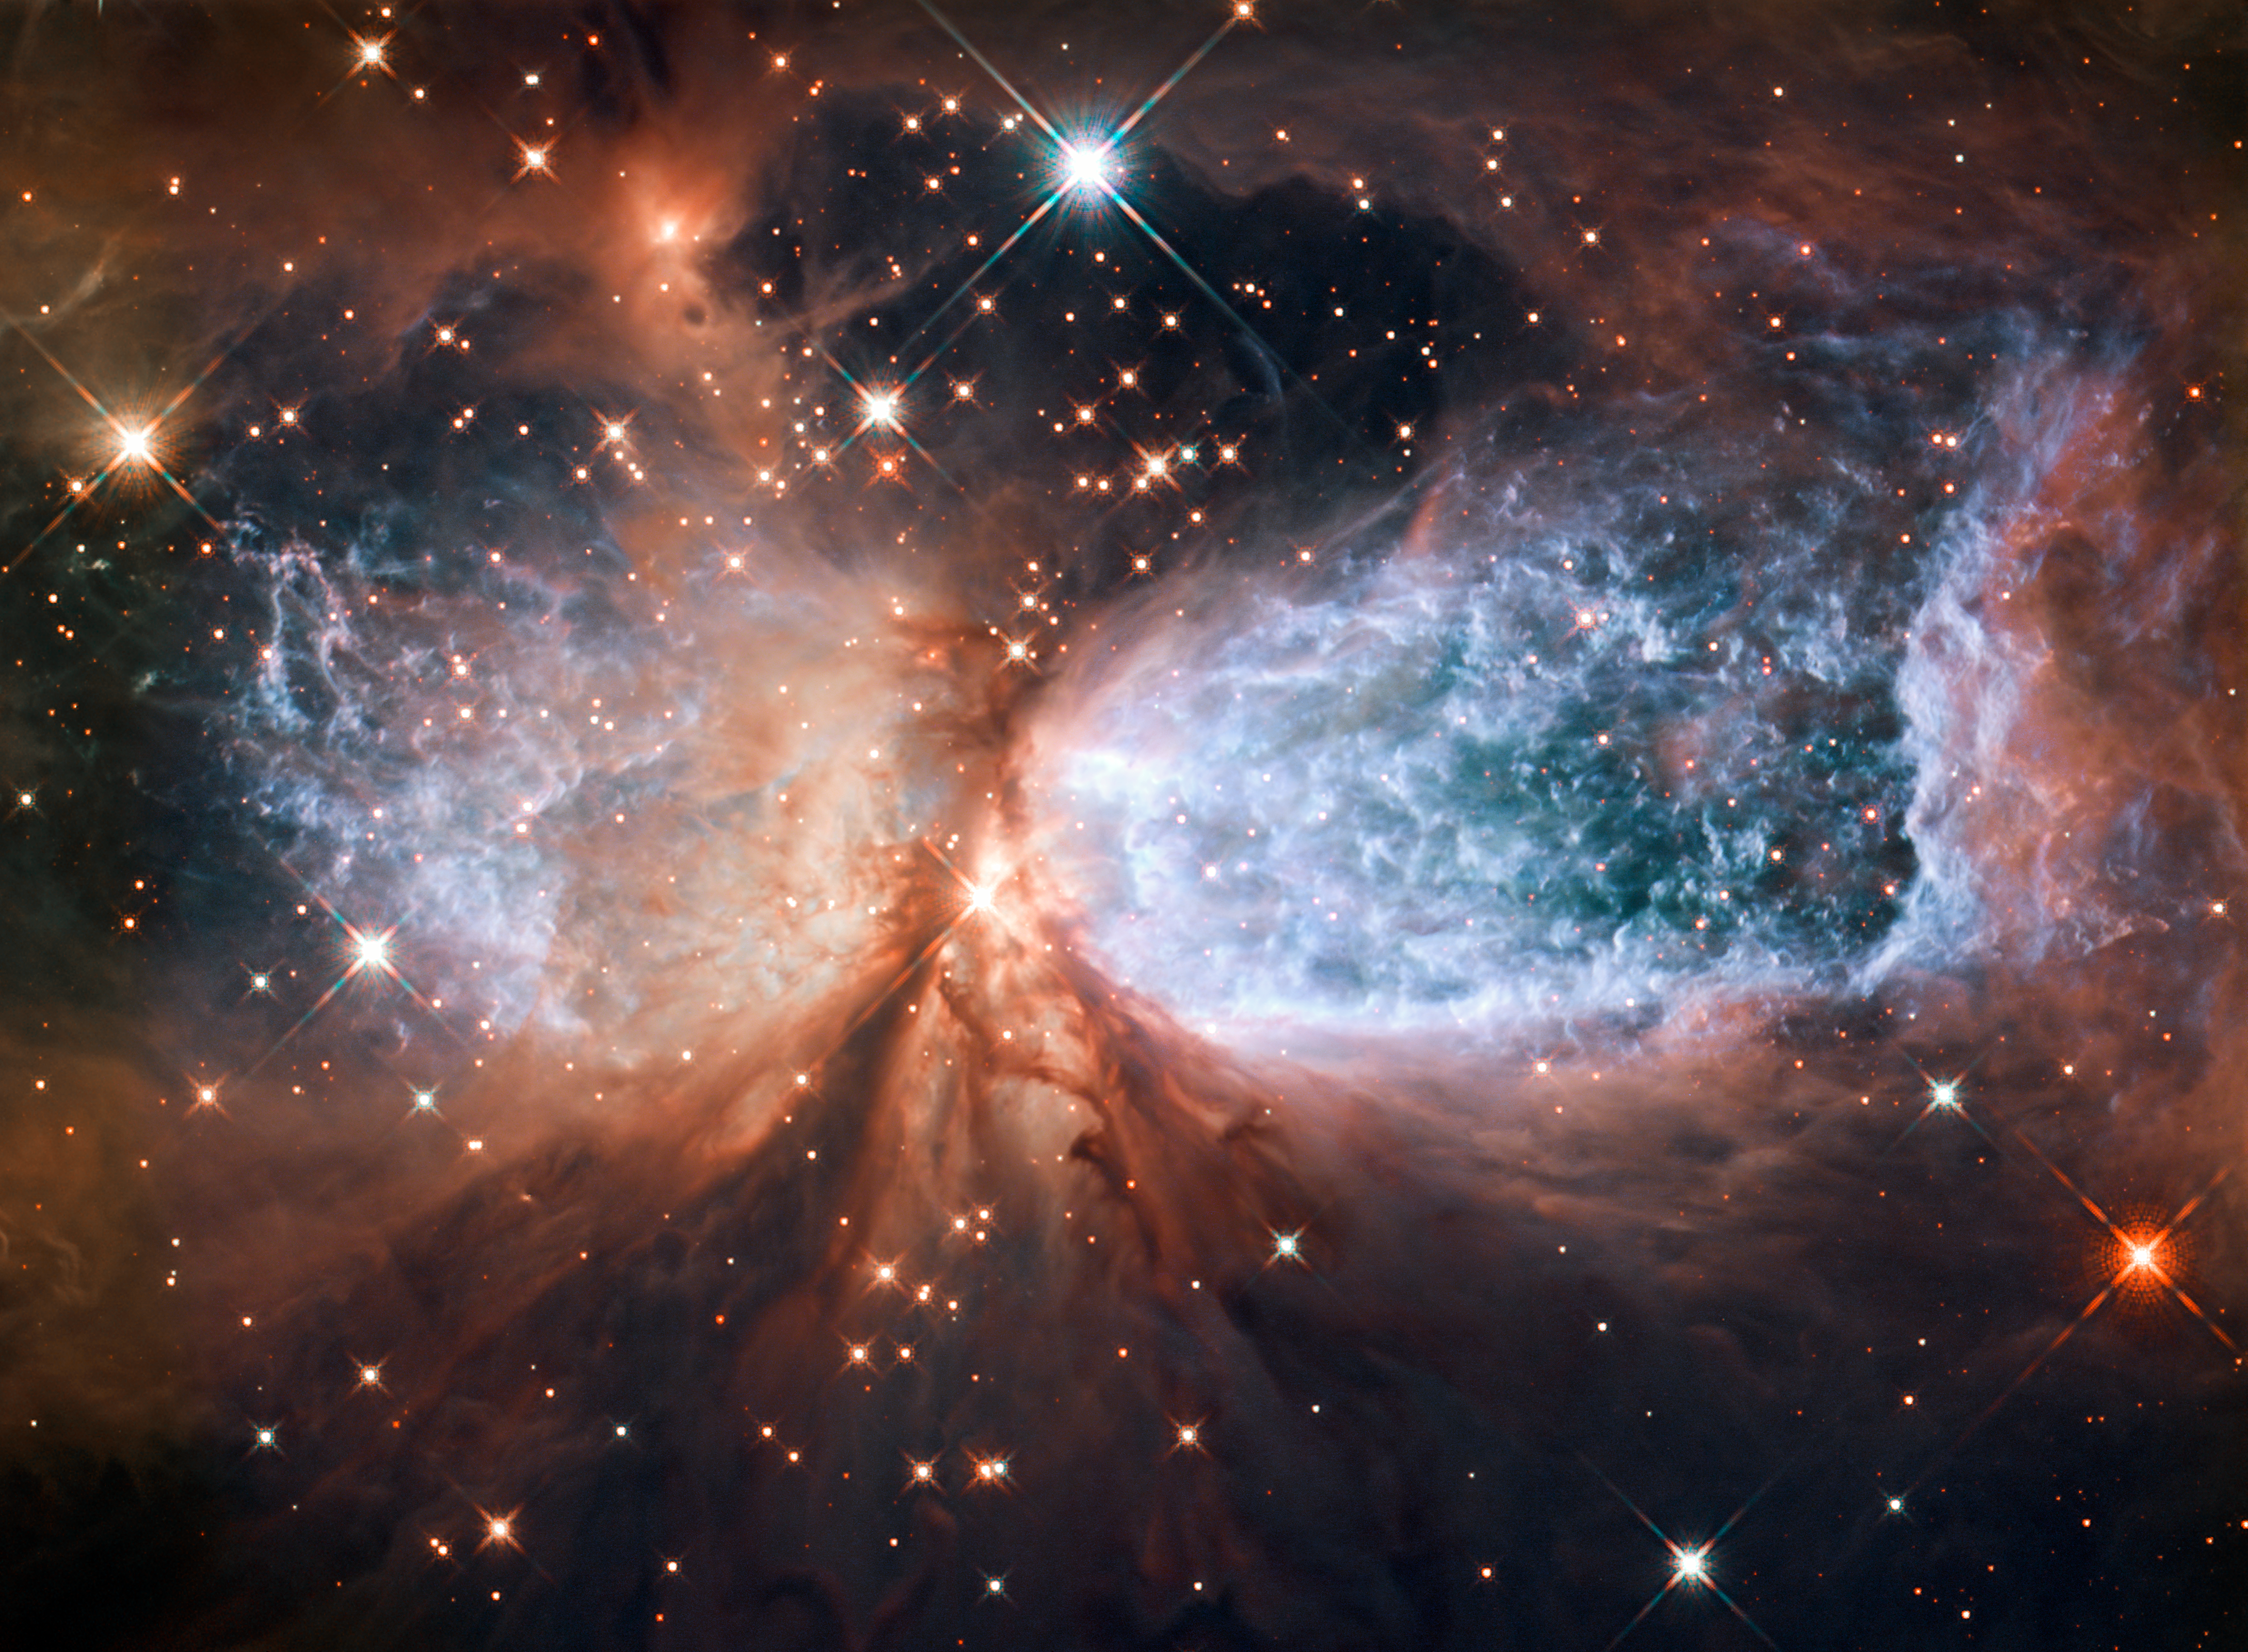

Hubble view of star-forming region S106

This image from the NASA/ESA Hubble Space Telescope shows Sh 2-106, or S106 for short. This is a compact star forming region in the constellation Cygnus (The Swan). A newly-formed star called S106 IR is shrouded in dust at the centre of the image, and is responsible for the surrounding gas cloud’s hourglass-like shape and the turbulence visible within. Light from glowing hydrogen is coloured blue in this image.

Credit: NASA & ESA